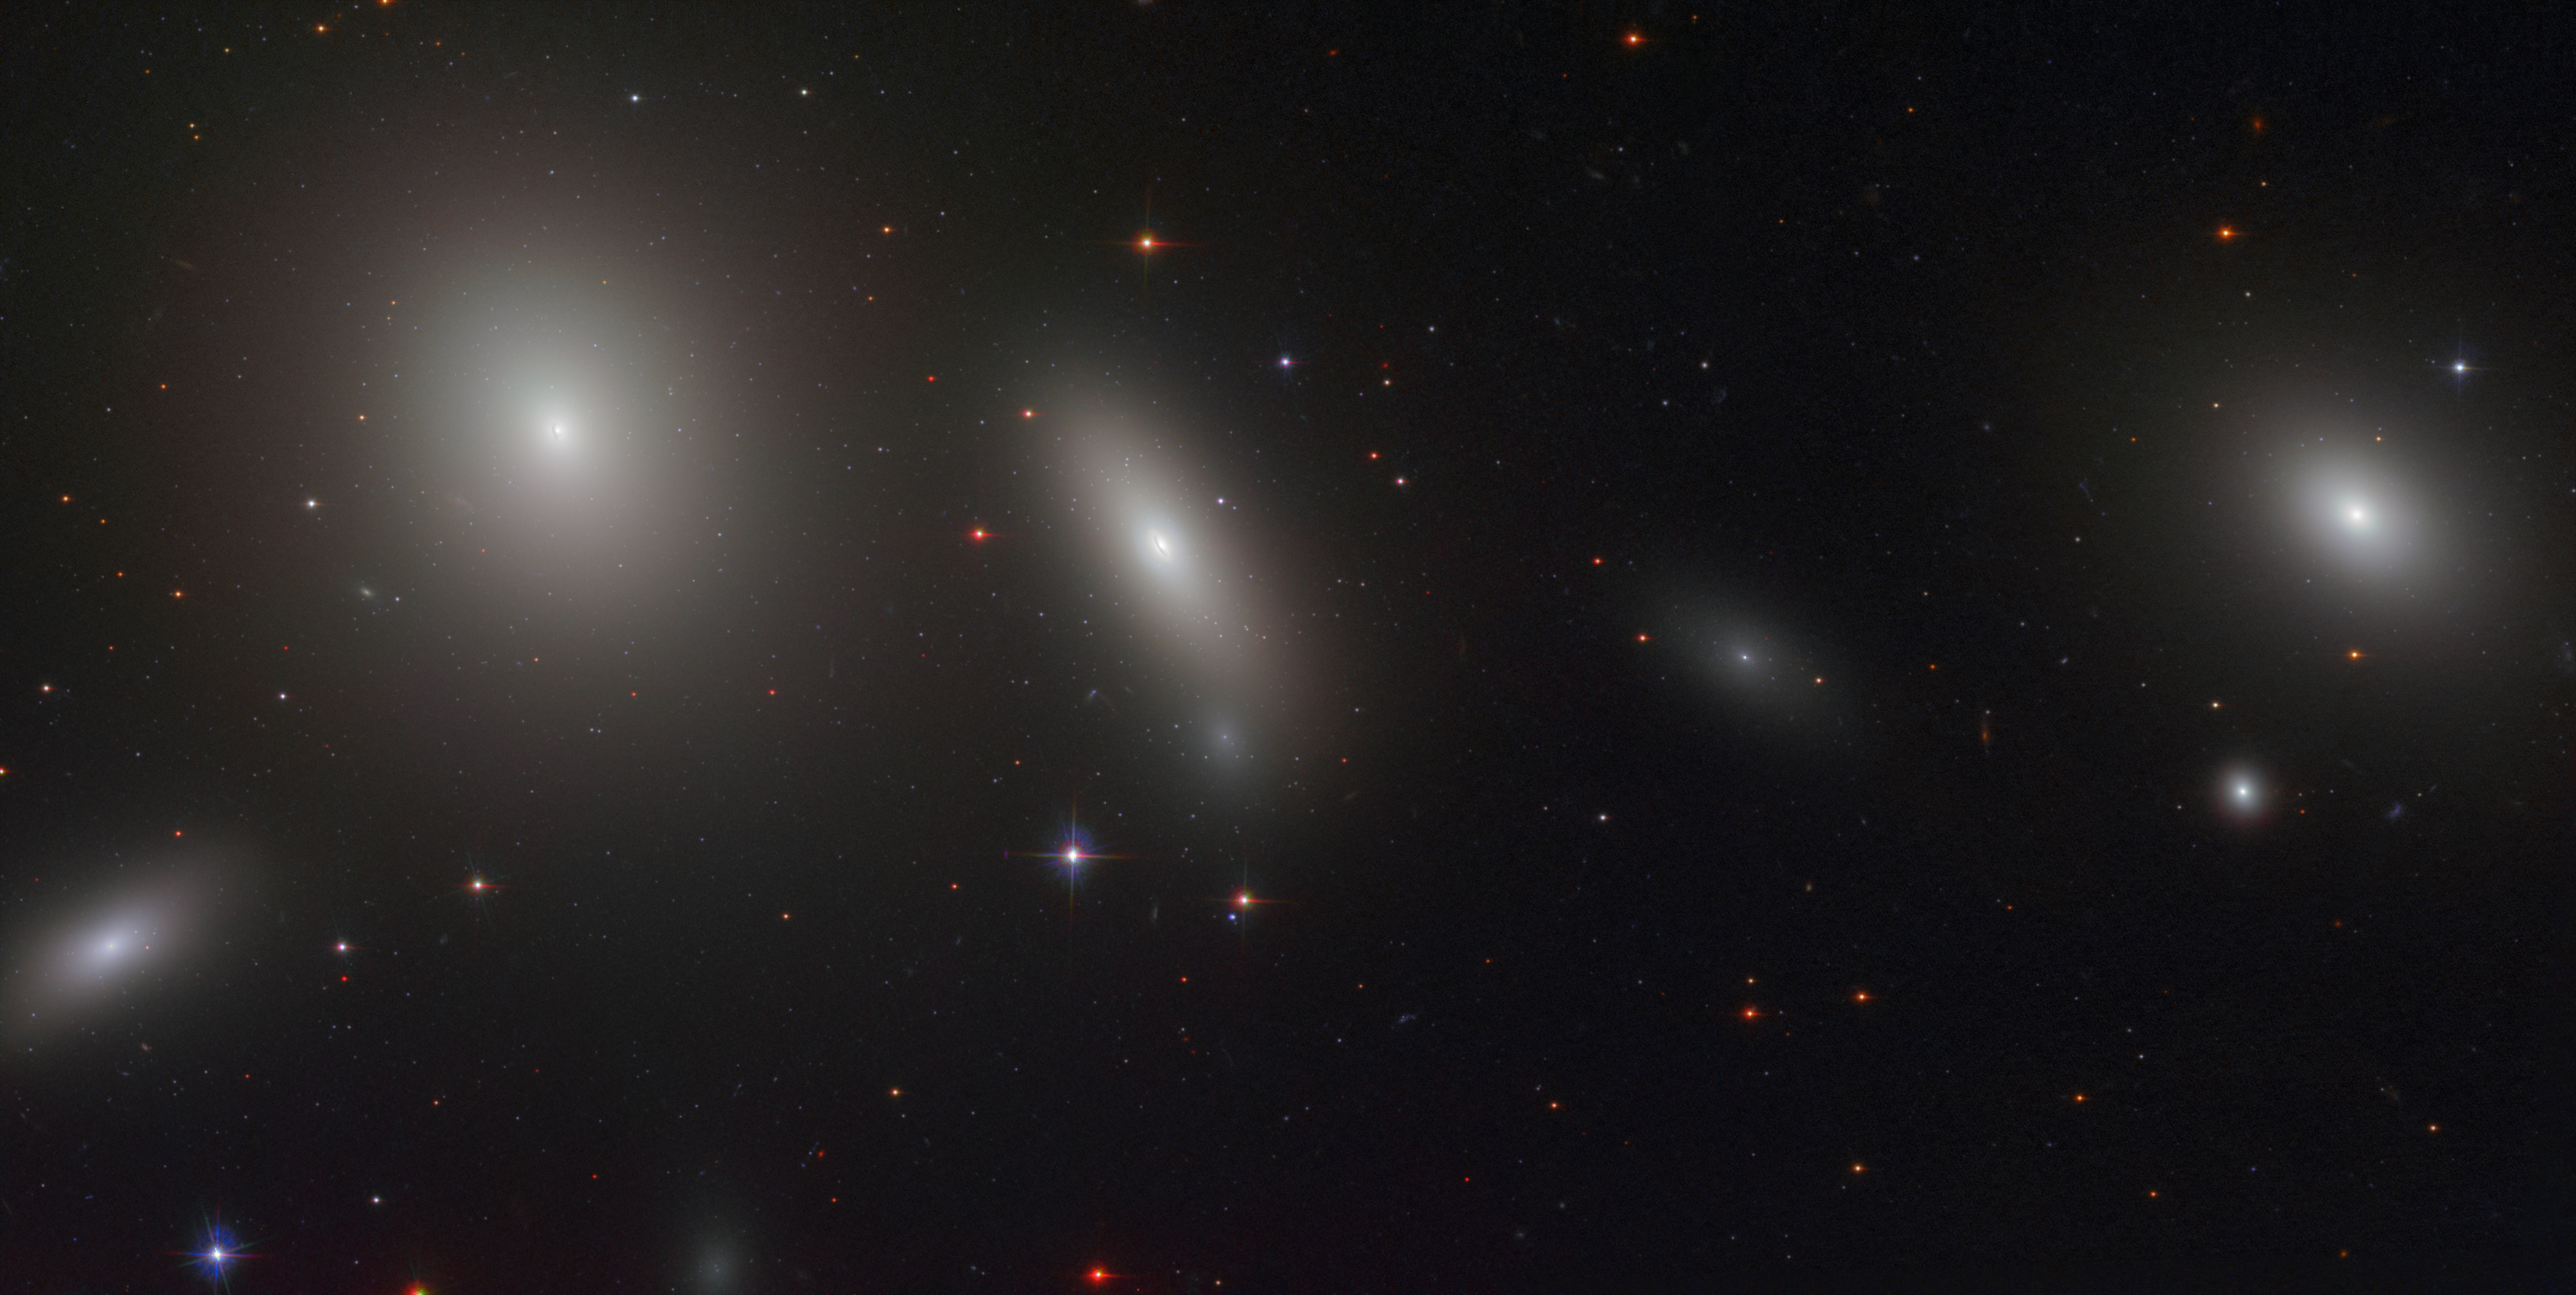

A red, metal-rich relic

This idyllic scene, packed with glowing galaxies, has something truly remarkable at its core: an untouched relic of the ancient Universe. This relic can be seen in the large galaxy at the centre of the frame, a lenticular galaxy named NGC 1277. This galaxy is a member of the famous Perseus Cluster — one of the most massive objects in the known Universe, located some 220 million light-years from Earth.

NGC 1277 has been dubbed a “relic of the early Universe” because all of its stars appear to have formed about 12 billion years ago. To put this in perspective, the Big Bang is thought to have happened 13.8 billion years ago. Teeming with billions of old, metal-rich stars, this galaxy is also home to many ancient globular clusters: spherical bundles of stars that orbit a galaxy like satellites. Uniquely, the globuar clusters of NGC 1277 are mostly red and metal-rich — very different to the blue, metal-poor clusters usually seen around similarly-sized galaxies. In astronomy, a metal is any element heavier than hydrogen and helium; these heavier elements are fused together in the hot cores of massive stars and scattered throughout the Universe when these stars explode as they die. In this way, a star’s metal content is related to its age: stars that form later contain greater amounts of metal-rich material, since previous generations of stars have enriched the cosmos from which they are born.

Massive galaxies — and their globular clusters — are thought to form in two phases: first comes an early collapse accompanied by a giant burst of star formation, which forms red, metal-rich clusters, followed by a later accumulation of material, which brings in bluer, metal-poor material. The discovery of NGC 1277’s red clusters confirms that the galaxy is a genuine antique that bypassed this second phase, raising important questions for scientists on how galaxies form and evolve: a hotly debated topic in modern astronomy.

Credit: NASA, ESA, and M. Beasley (Instituto de Astrofísica de Canarias)